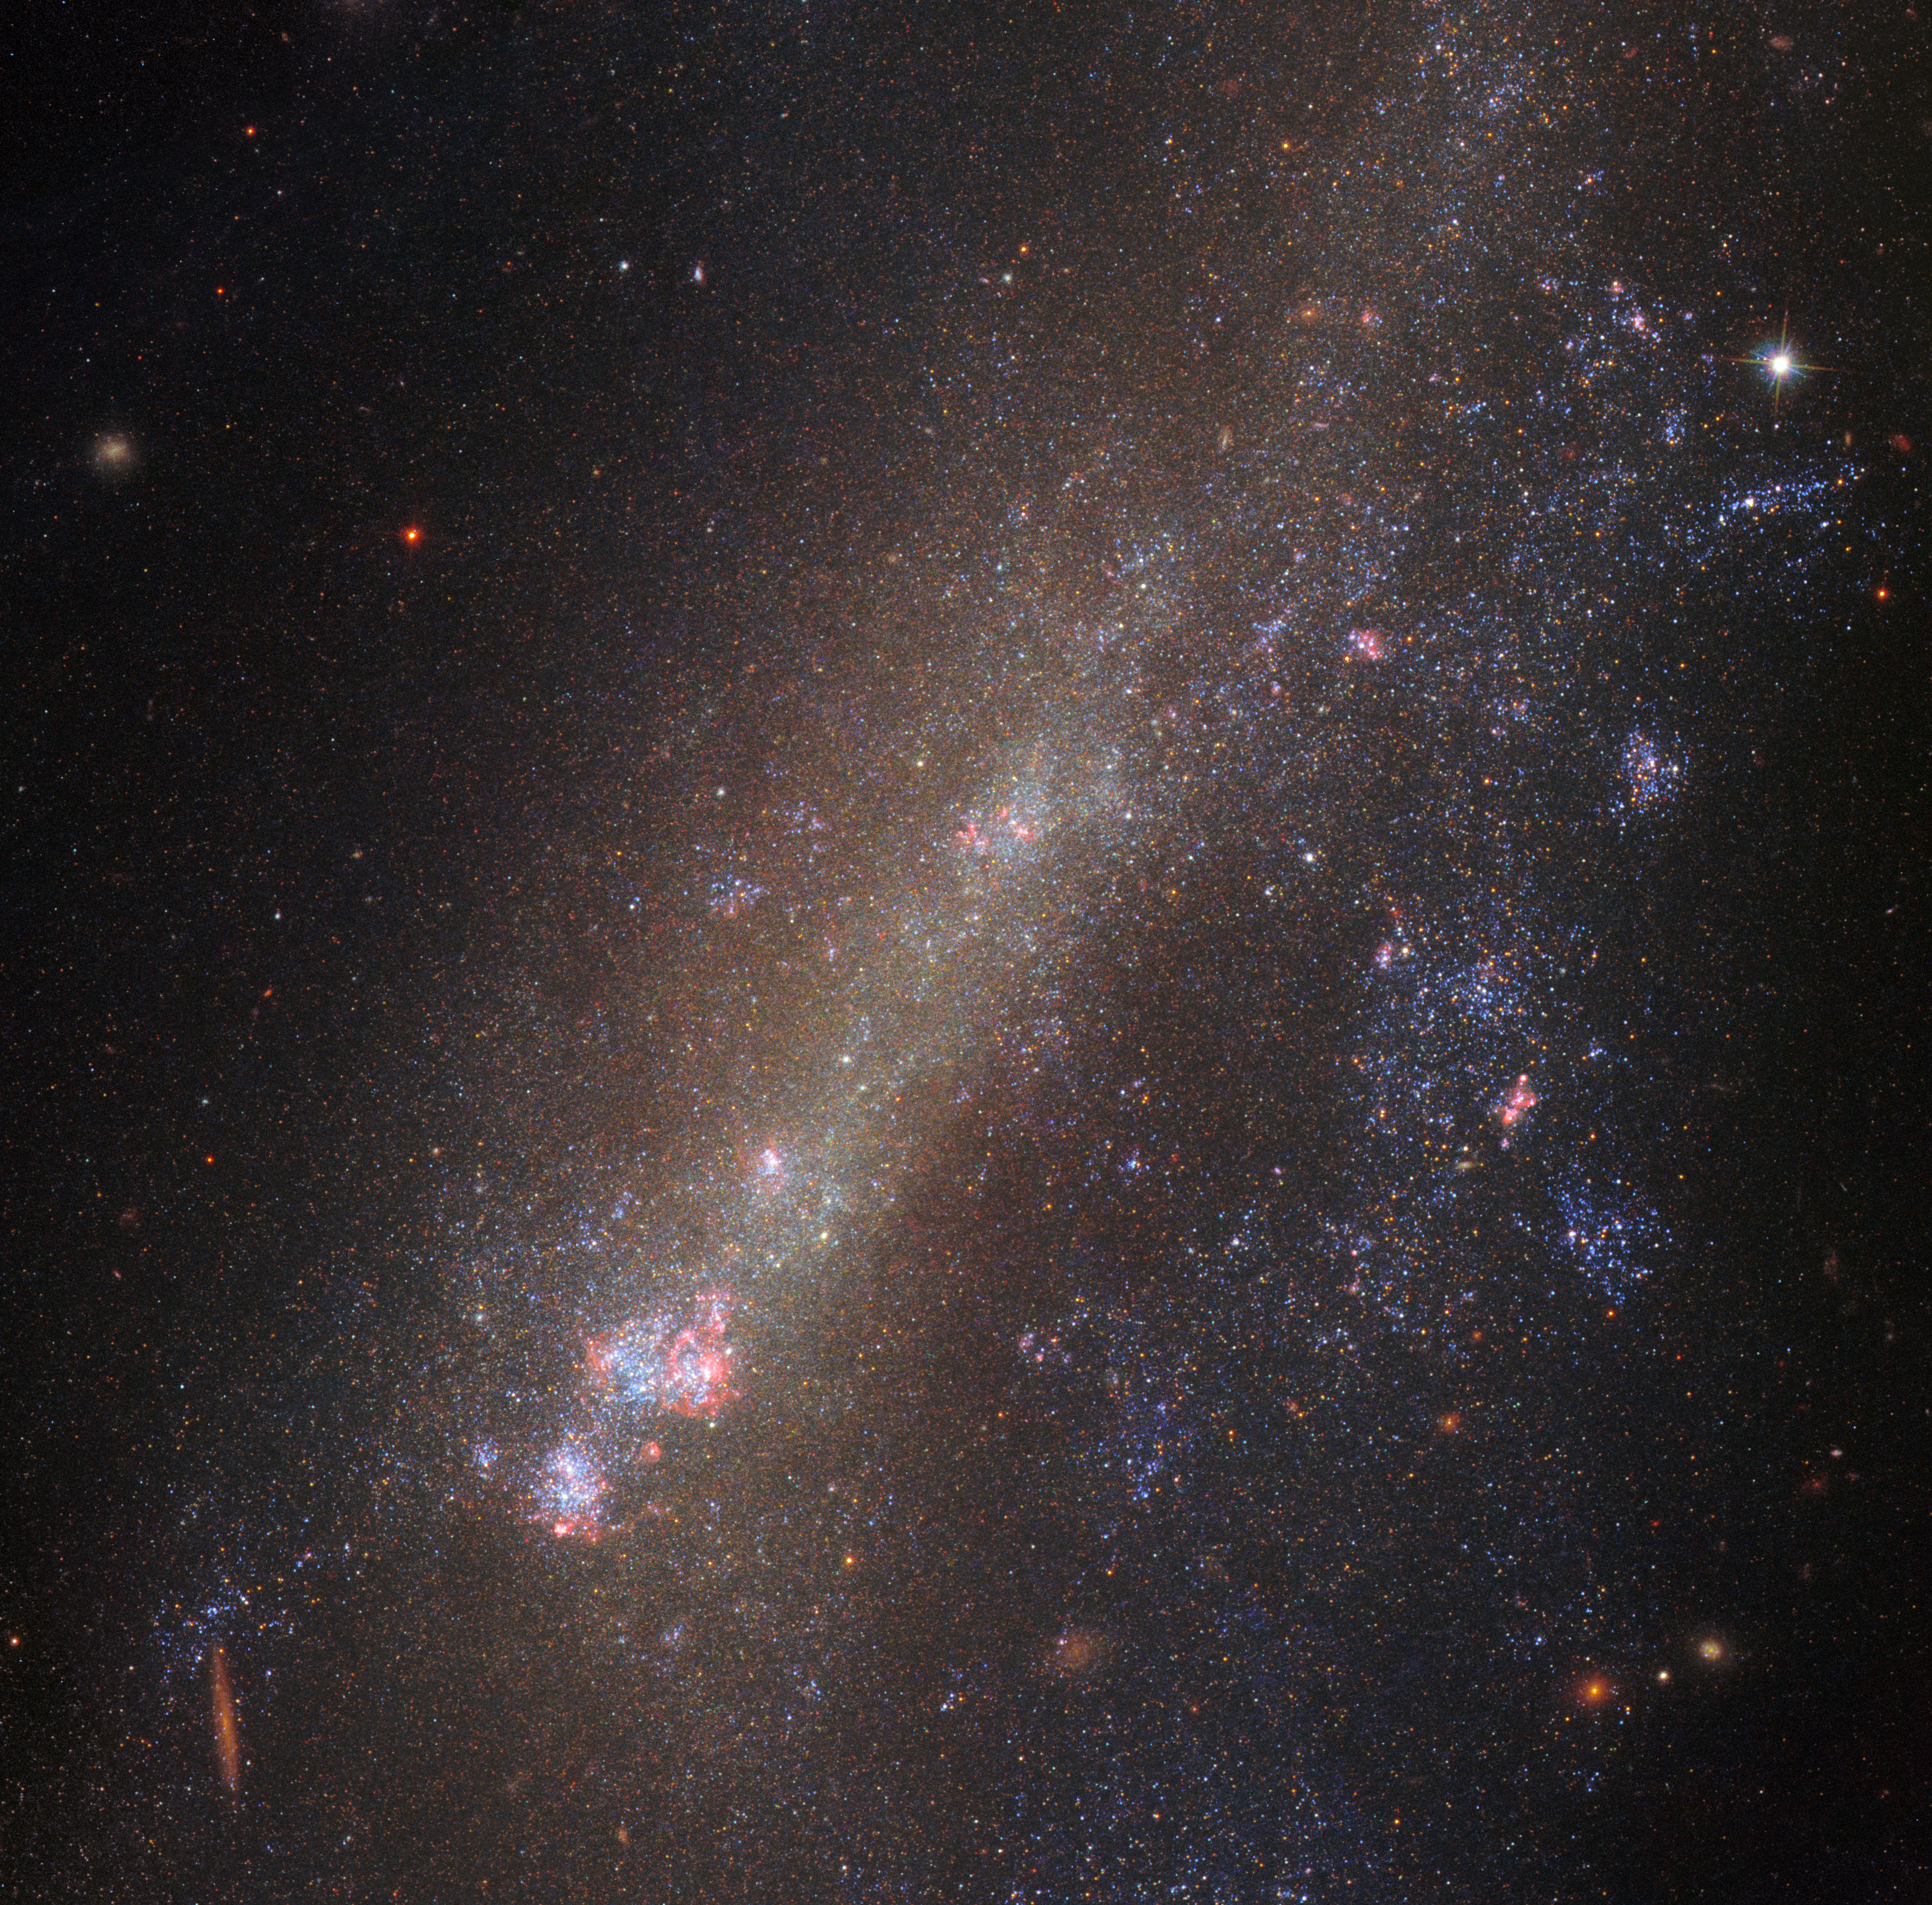

A distorted duo

Gravity governs the movements of the cosmos. It draws flocks of galaxies together to form small groups and more massive galaxy clusters, and brings duos so close that they begin to tug at one another. This latter scenario can have extreme consequences, with members of interacting pairs of galaxies often being dramatically distorted, torn apart, or driven to smash into one another, abandoning their former identities and merging to form a single accumulation of gas, dust, and stars.

The subject of this NASA/ESA Hubble Space Telescope image, IC 1727, is currently interacting with its near neighbour, NGC 672 (which is just out of frame). The pair’s interactions have triggered peculiar and intriguing phenomena within both objects — most noticeably in IC 1727. The galaxy’s structure is visibly twisted and asymmetric, and its bright nucleus has been dragged off-centre.

In interacting galaxies such as these, astronomers often see signs of intense star formation (in episodic flurries known as starbursts) and spot newly-formed star clusters. They are thought to be caused by gravity churning, redistributing, and compacting the gas and dust. In fact, astronomers have analysed the star formation within IC 1727 and NGC 672 and discovered something interesting — observations show that simultaneous bursts of star formation occurred in both galaxies some 20 to 30 and 450 to 750 million years ago. The most likely explanation for this is that the galaxies are indeed an interacting pair, approaching each other every so often and swirling up gas and dust as they pass close by.

Credit: ESA/Hubble & NASA